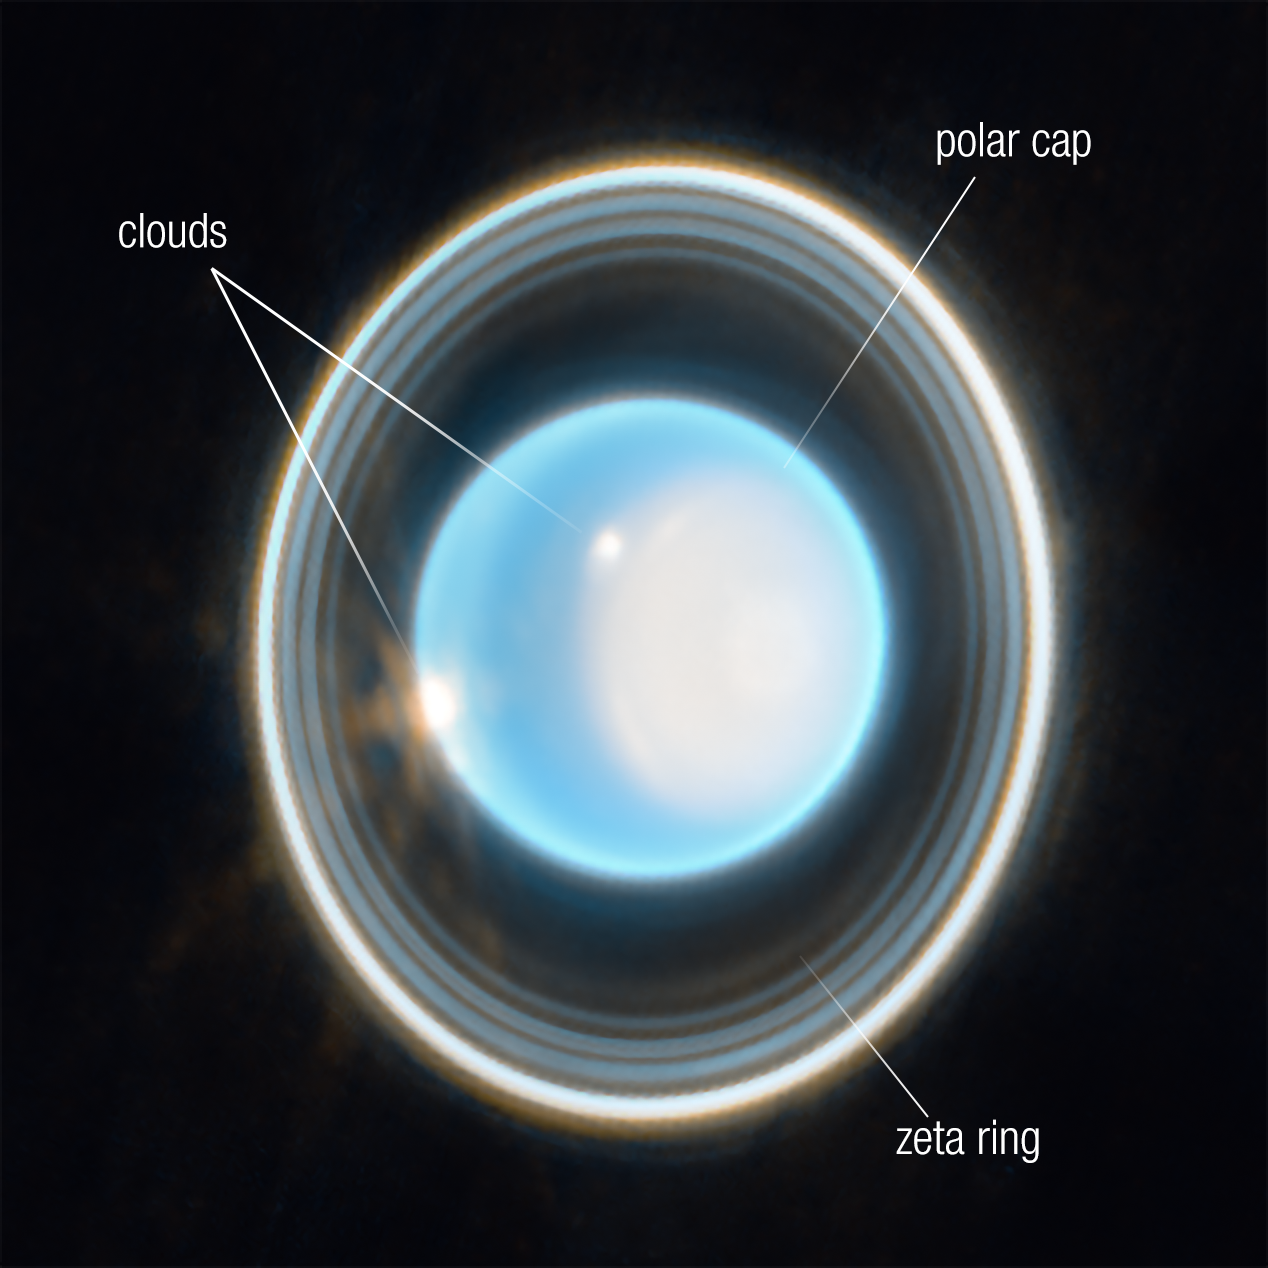

Zoomed-in image of Uranus (Annotated)

This annotated, zoomed-in image of Uranus, captured by Webb’s Near-Infrared Camera (NIRCam) on 6 February 2023, reveals stunning views of the planet’s rings, as well as clouds and the polar cap.

On the right side of the planet is an area of brightening at the pole facing the Sun, known as a polar cap. This polar cap is unique to Uranus because it is the only planet in the Solar System that is tilted on its side, which causes its extreme seasons. A new aspect of the polar cap revealed by Webb is a subtle brightening near the Uranian north pole.

At the edge of the polar cap lies a bright cloud and a few fainter extended features can be seen just beyond the cap’s edge; a second very bright cloud is seen at the planet’s left limb. Such clouds are typical for Uranus at infrared wavelengths, and are likely connected to storm activity.

The planet displays a blue hue in this representative-colour image, made by combining data from two filters (F140M, F300M) at 1.4 and 3.0 microns, which are assigned to blue and orange, respectively.

Credit: NASA, ESA, CSA, STScI, J. DePasquale (STScI)